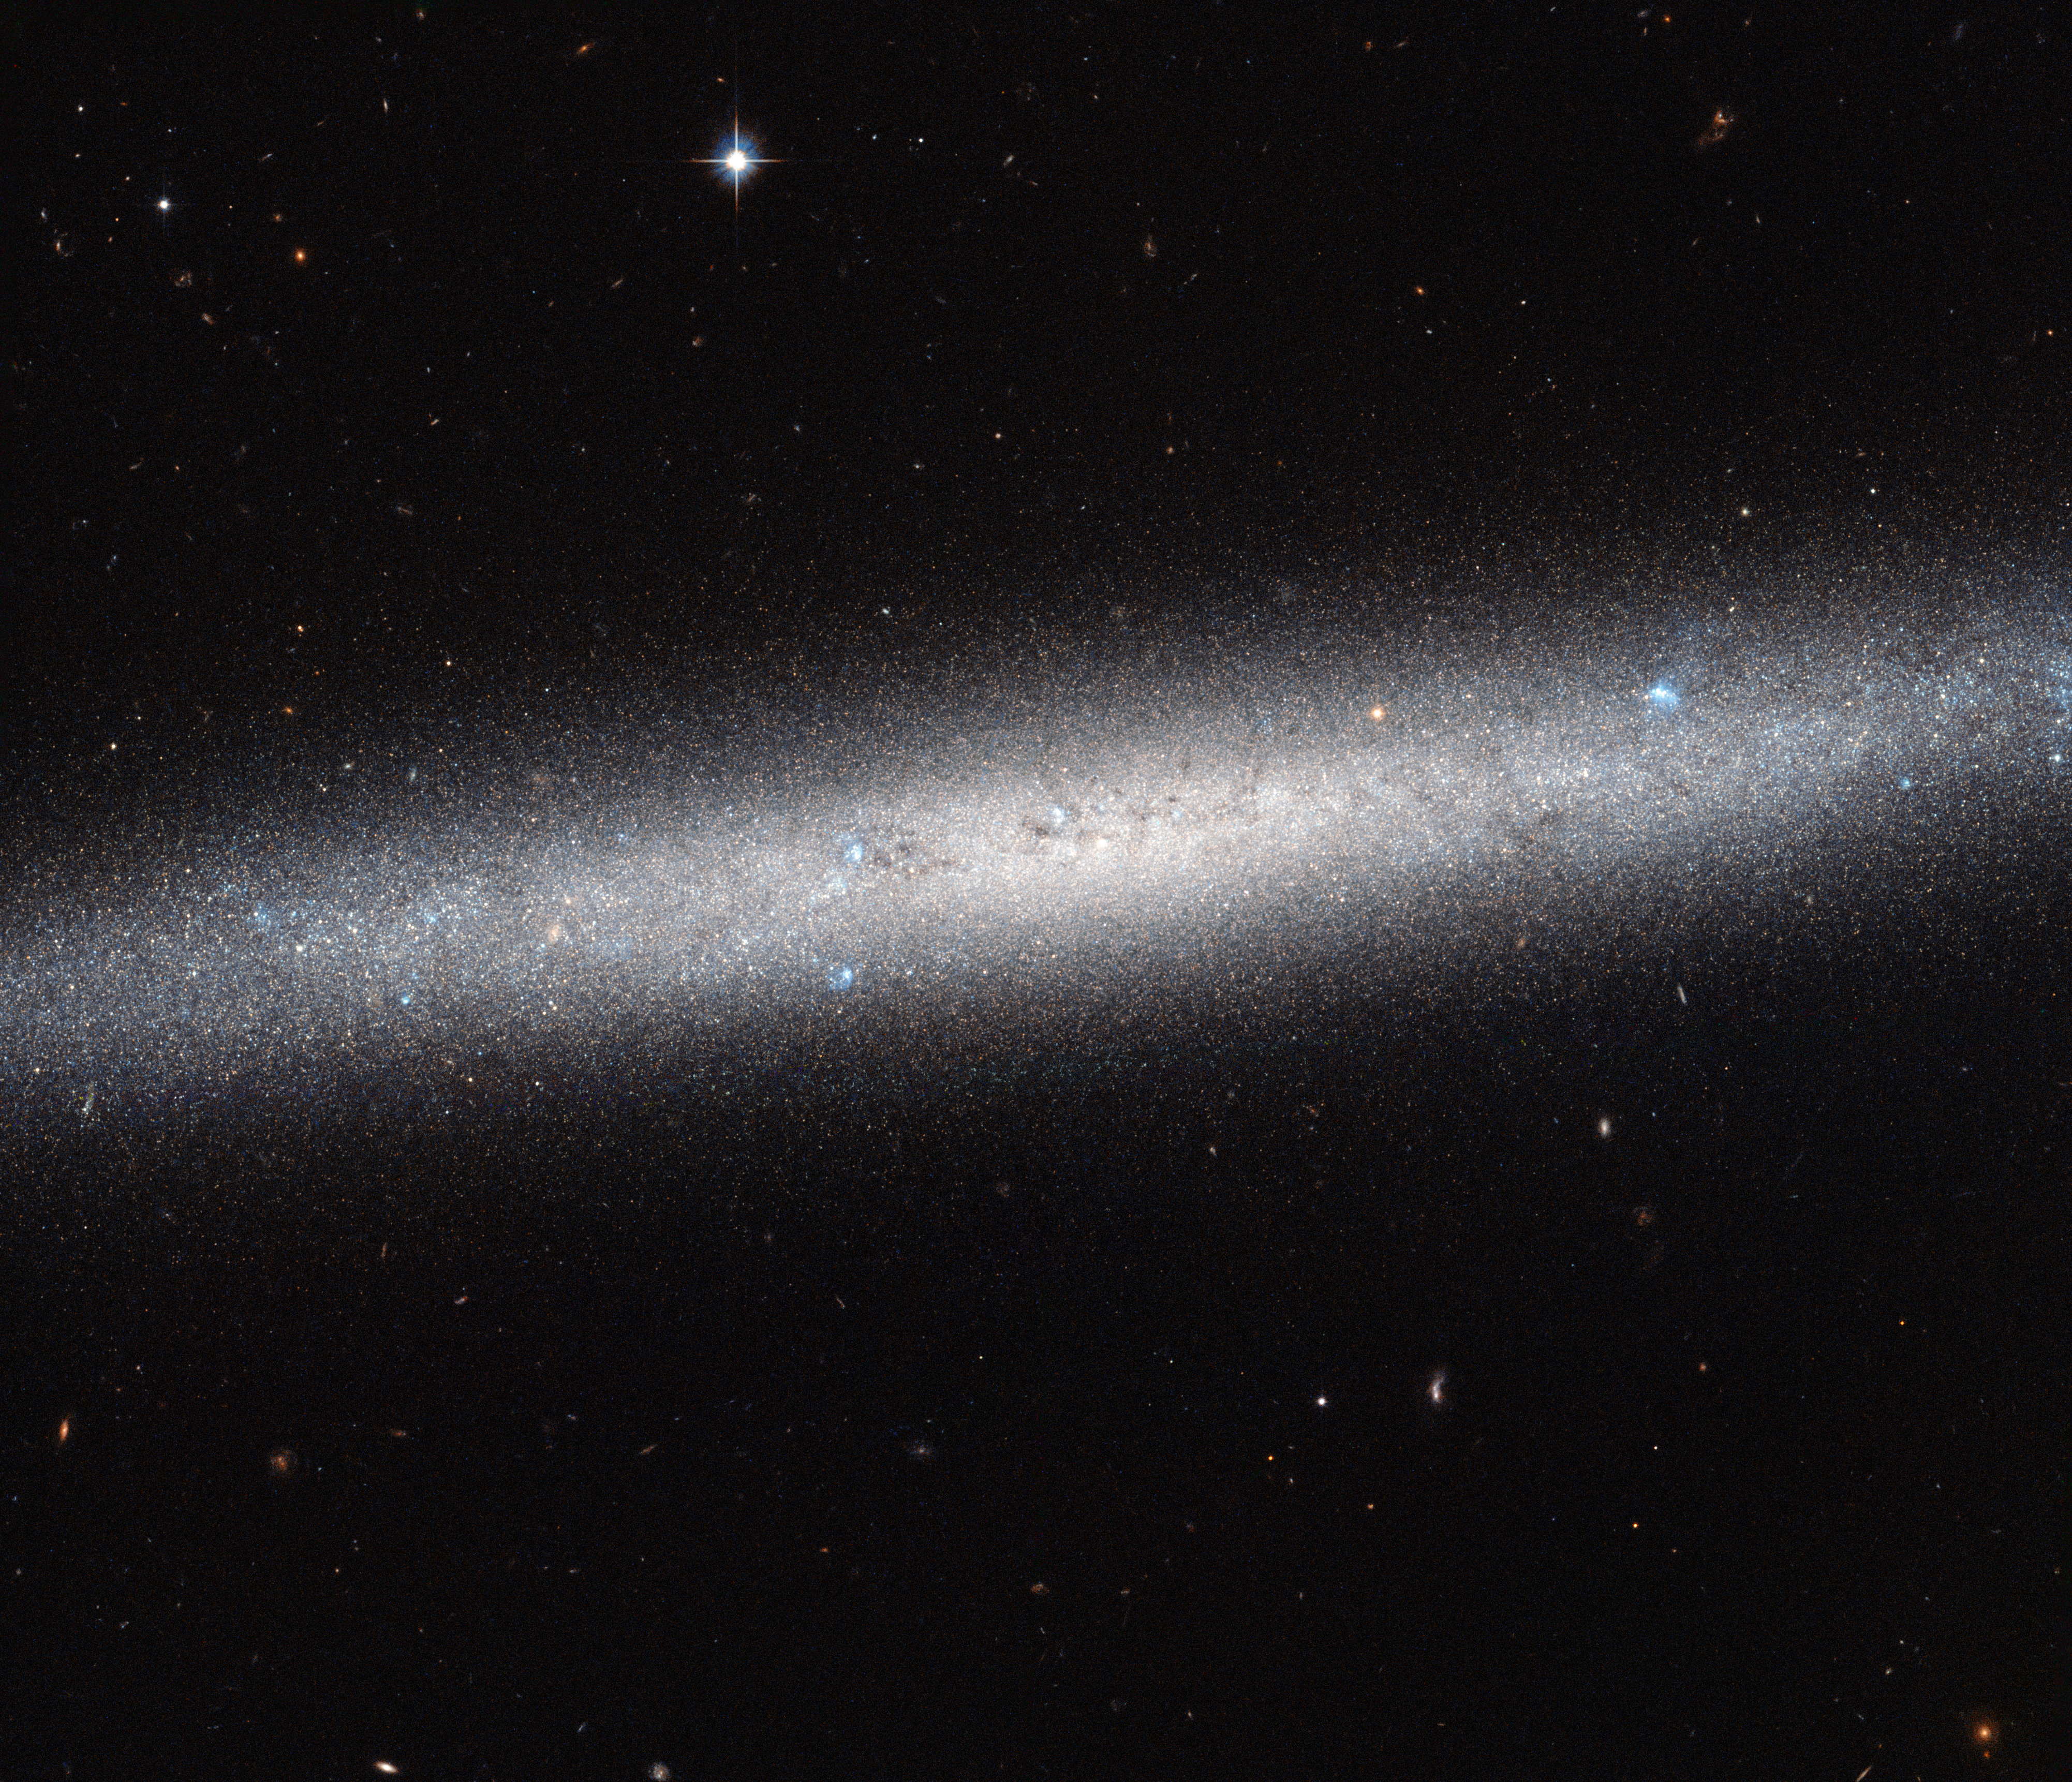

A galaxy on the edge

This NASA/ESA Hubble Space Telescope image shows an edge-on view of the spiral galaxy NGC 5023. Due to its orientation we cannot appreciate its spiral arms, but we can admire the elegant profile of its disc. The galaxy lies over 30 million light-years away from us.

NGC 5023 is part of the M51 group of galaxies. The brightest galaxy in this group is Messier 51, the Whirlpool Galaxy, which has been captured by Hubble many times. NGC 5023 is less fond of the limelight and seems rather unsociable in comparison — it is relatively isolated from the other galaxies in the group.

Astronomers are particularly interested in the vertical structure of discs like these. By analysing the structure above and below the central plane of the galaxy they can make progress in understanding galaxy evolution. Astronomers are able to analyse the distribution of different types of stars within the galaxy and their properties, in particular how well evolved they are on the Hertzsprung–Russell Diagram — a scatter graph of stars that shows their evolution.

NGC 5023 is one of six edge-on spiral galaxies observed as part of a study using Hubble’s Advanced Camera for Surveys. They study this vertical distribution and find a trend which suggests that heating of the disc plays an important role in producing the stars seen away from the plane of the galaxy.

In fact, NGC 5023 is pretty popular when it comes to astronomers, despite its unsociable behaviour. The galaxy is also one of 14 disc galaxies that are part of the GHOSTS survey — a survey which uses Hubble data to study galaxy halos, outer discs and star clusters. It is the largest study to date of star populations in the outskirts of disc galaxies.

The incredible sharp sight of Hubble has allowed scientist to count more than 30 000 individual bright stars in this image. This is only a small fraction of the several billion stars that this galaxy contains, but the others are too faint to detect individually even with Hubble.

Credit: ESA/Hubble & NASA